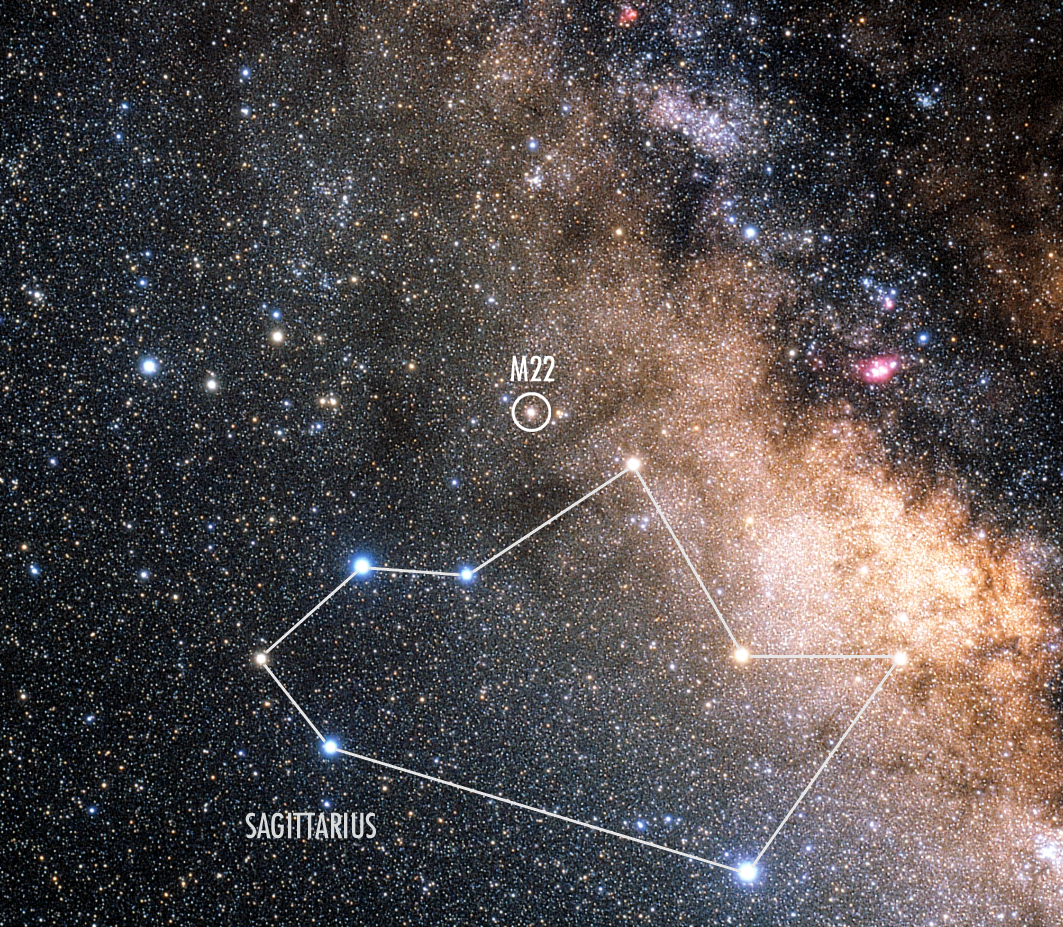

The constellation Sagittarius (Annotated ground-based view)

The constellation Sagittarius (the Archer), home to the globular cluster M22, is one of the best known constellations in the sky. Sagittarius contains a large number of famous nebulae and star clusters due to the presence of some of the richest star fields of the Milky Way. The very centre of the Milky Way lies in the direction of Sagittarius. Some of the brighter stars in Sagittarius are known as the Teapot, the shape of which is indicated by the lines here (handle to the left, spout to the right).

Credit: ESA, NASA & Akira Fujii